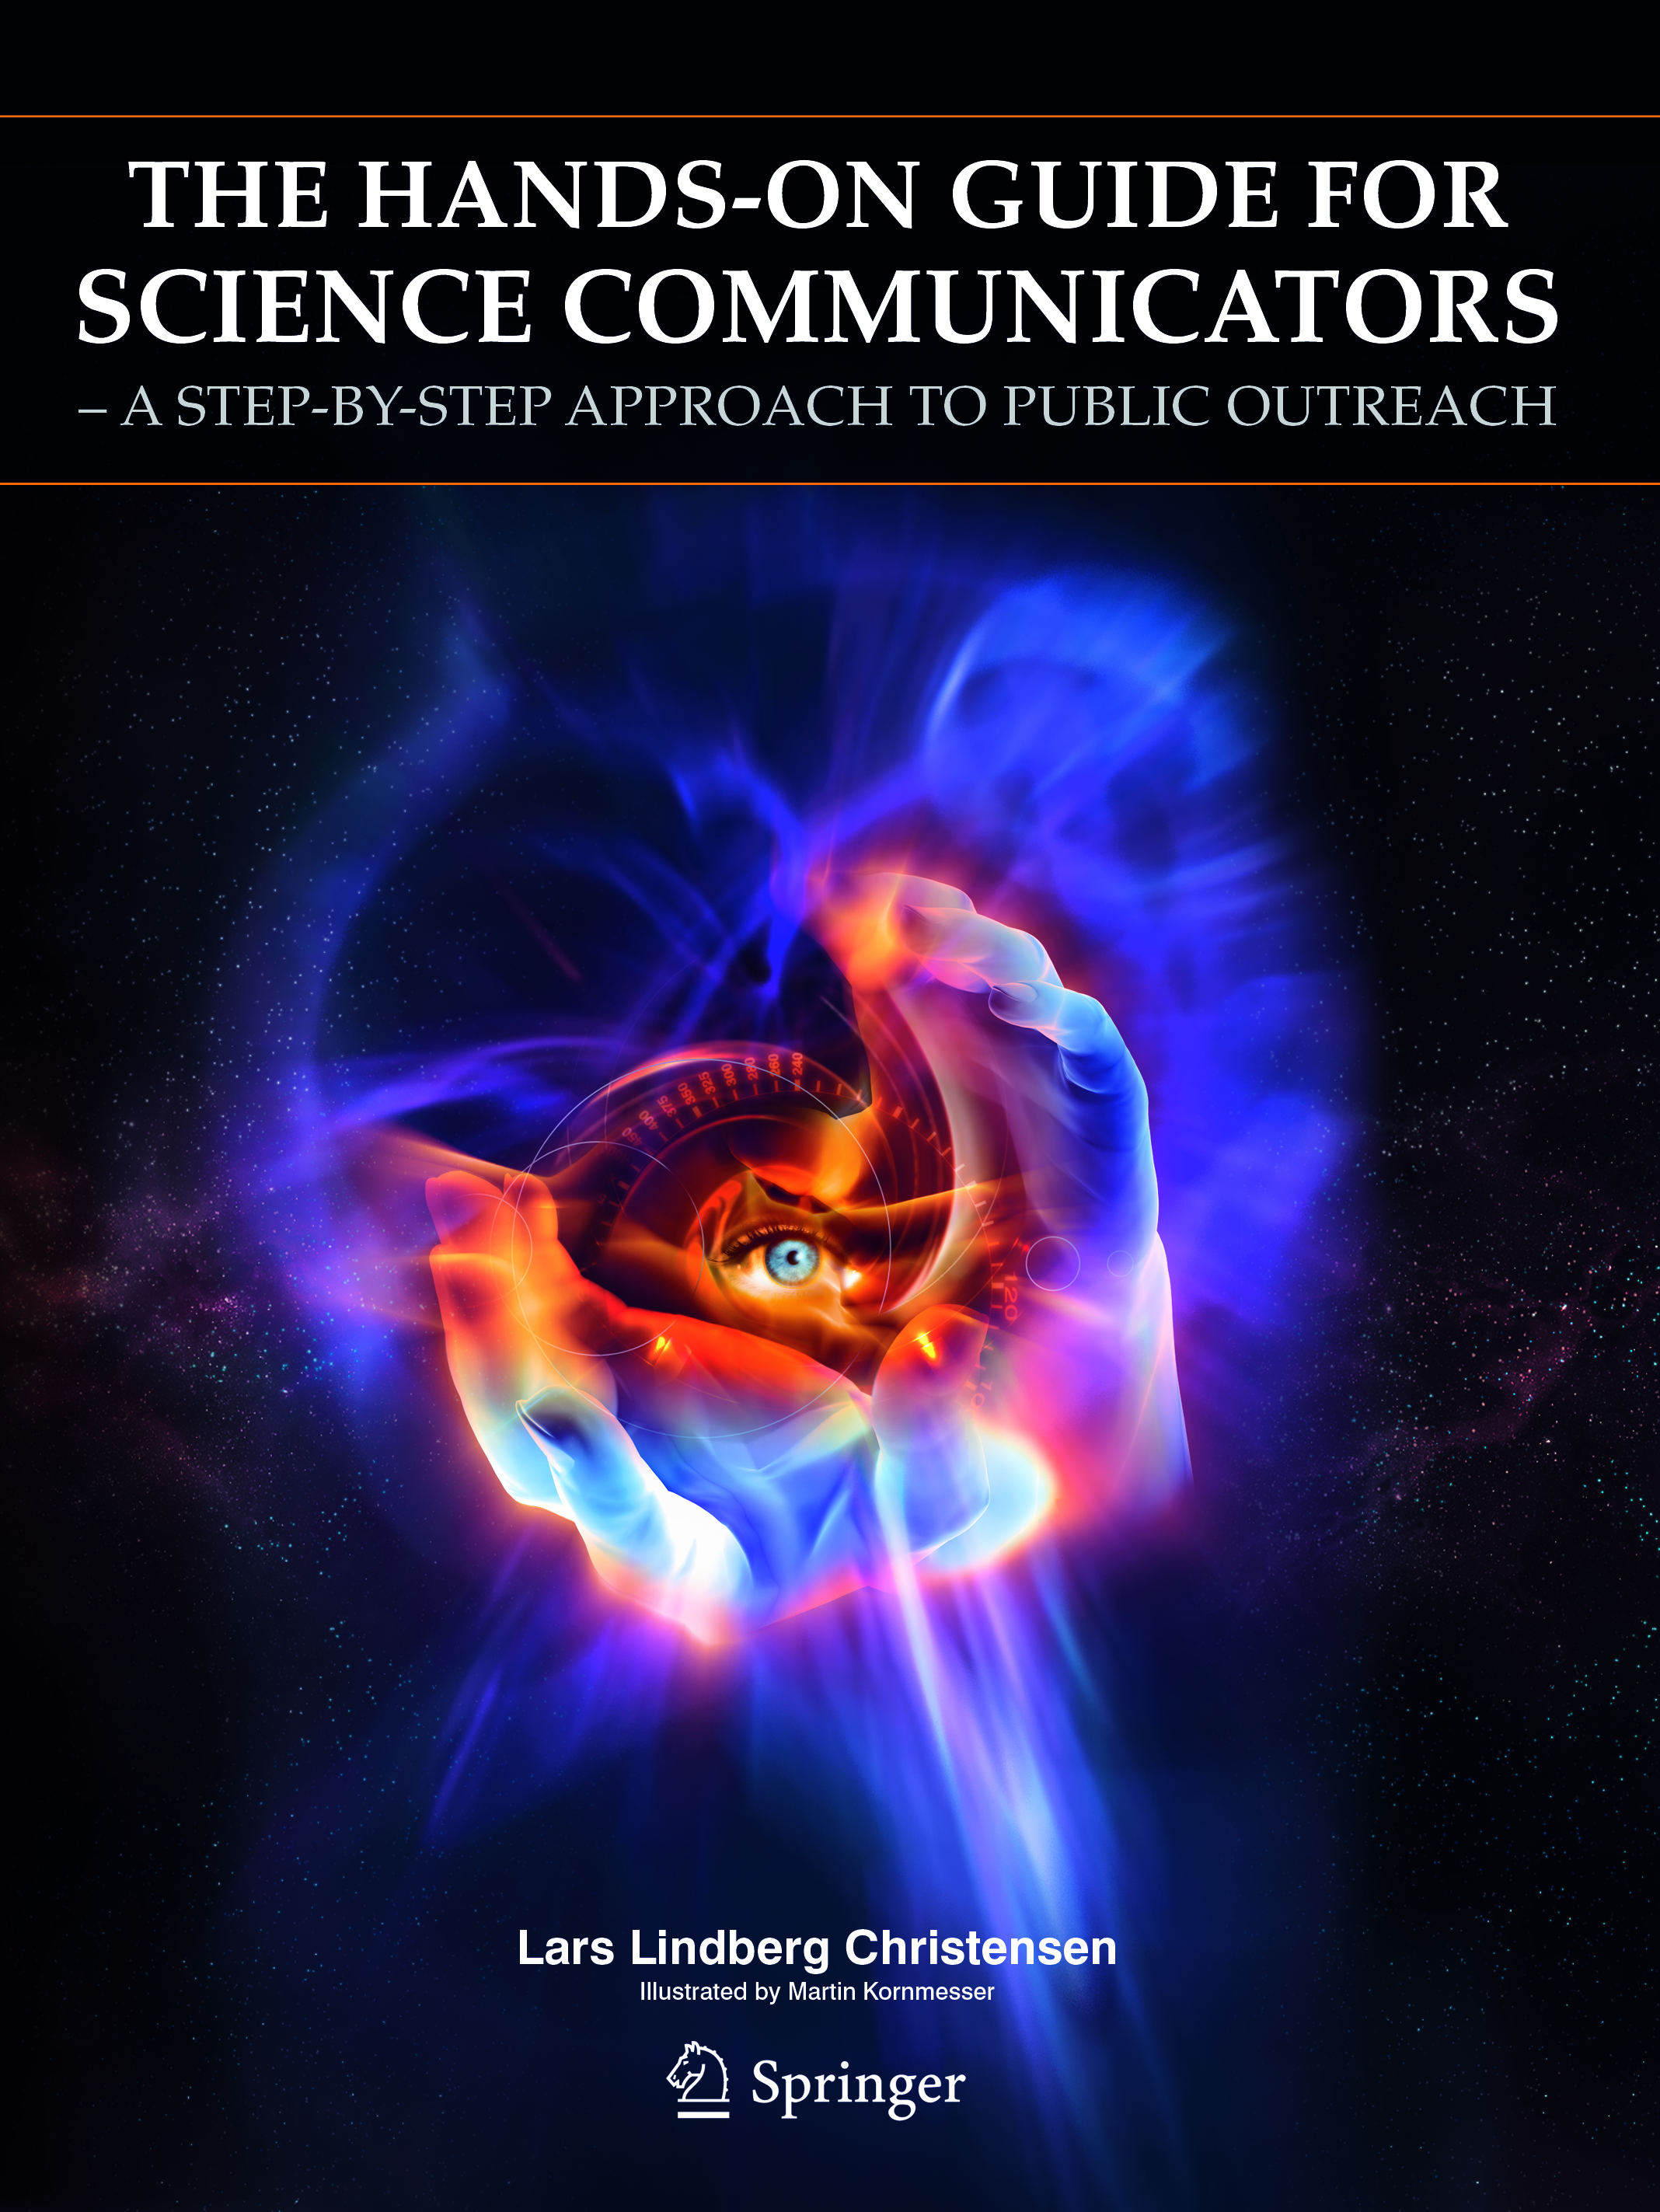

Hands-on guide for science communicators released

A new book on practical science communication has just been published by Springer, New York. Presented by an experienced science communicator, this work shows how to create the perfect marriage between science and communication. Drawing inspiration and examples from his years of experience in the field, Lars Lindberg Christensen from the Hubble European Space Agency Information Centre offers hands-on advice about some of the most central topics of practical popular science communication with numerous examples from physics and astronomy.

Aimed at both the general public and a more specialized audience – working as science communicators in a variety of communication offices in scientific institutions, the book provides the inspiration and the steps to become a good science communicator.

The hands-on guide offers practical advice on all aspects of science communication: product types, target groups, written communication, visual communication, validation processes, practices of efficient workflow, distribution, promotion, advertising, and much more. Extremely practical, the guide provides the necessary "shortcuts" to produce outreach products of high quality. All concepts are explained with simple terms and illustrative examples while check lists and short "to-the-point" overviews enable rapid progress and quick results.

The book does an outstanding job at bringing such different disciplines together in an easy and understandable way. The work emphasizes the value of science culture in our society as well as the need for properly qualified science communicators who are capable of addressing the needs of a rapidly progressing society where the knowledge gap between the average citizen and scientists is constantly increasing.

This book is thus an essential guide for new as well as seasoned science communicators looking for an insight into how to improve the science communication process in this era of rapid scientific advances.

Credit: NASA & ESA